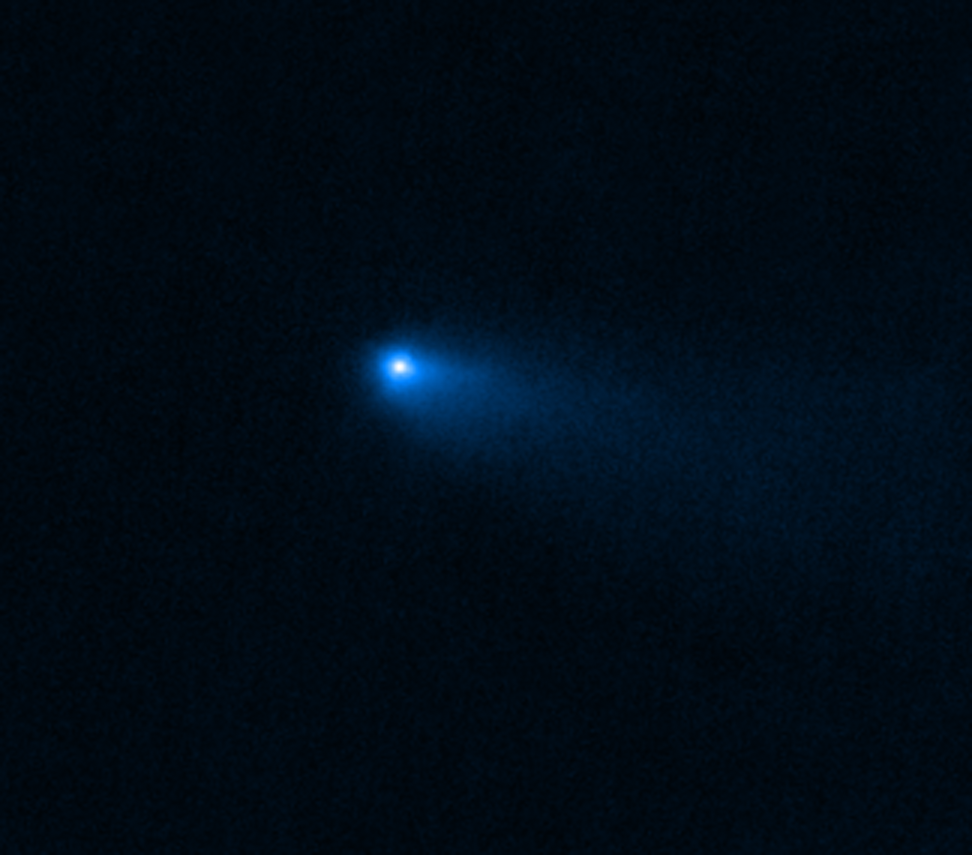

NIRCam image of Comet 238P/Read

This image of Comet 238P/Read was captured by the NIRCam (Near-Infrared Camera) instrument on the NASA/ESA/CSA James Webb Space Telescope on 8 September 2022. It displays the hazy halo, called the coma, and tail that are characteristic of comets, as opposed to asteroids. The dusty coma and tail result from the vapourisation of ices as the Sun warms the main body of the comet.

Credit: NASA, ESA, CSA, M. Kelley (University of Maryland), H. Hsieh (Planetary Science Institute), A. Pagan (STScI)